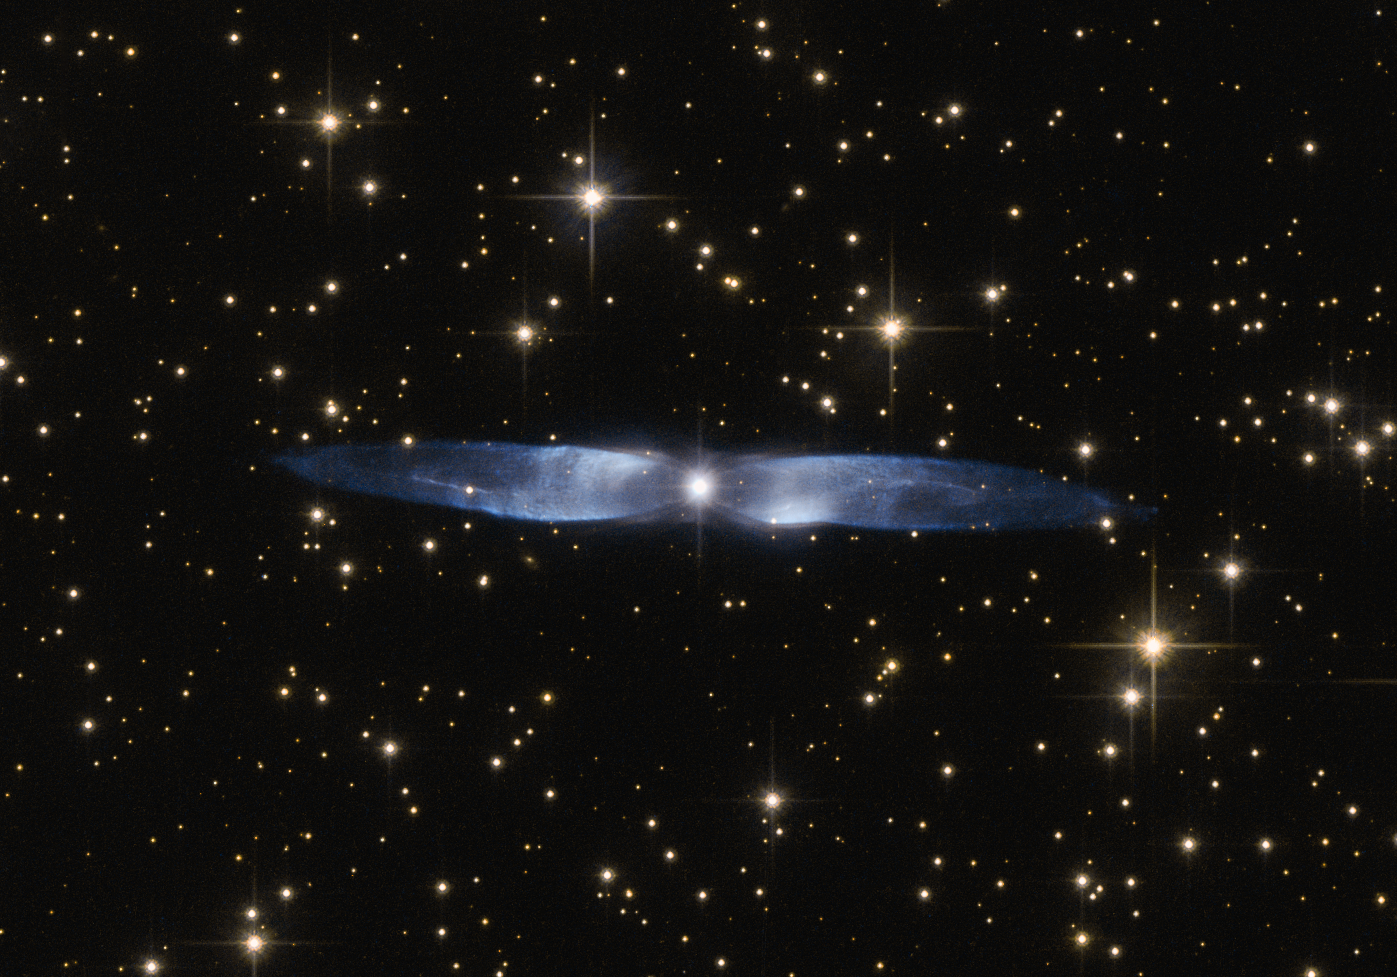

The icy blue wings of Hen 2-437

In this cosmic snapshot, the spectacularly symmetrical wings of Hen 2-437 show up in a magnificent icy blue hue. Hen 2-437 is a planetary nebula, one of around 3000 such objects known to reside within the Milky Way.

Located within the faint northern constellation of Vulpecula (The Fox), Hen 2-437 was first identified in 1946 by Rudolph Minkowski, who later also discovered the famous and equally beautiful M2-9 (otherwise known as the Twin Jet Nebula). Hen 2-437 was added to a catalogue of planetary nebula over two decades later by astronomer and NASA astronaut Karl Gordon Henize.

Planetary nebulae such as Hen 2-437 form when an aging low-mass star — such as the Sun — reaches the final stages of life. The star swells to become a red giant, before casting off its gaseous outer layers into space. The star itself then slowly shrinks to form a white dwarf, while the expelled gas is slowly compressed and pushed outwards by stellar winds. As shown by its remarkably beautiful appearance, Hen 2-437 is a bipolar nebula — the material ejected by the dying star has streamed out into space to create the two icy blue lobes pictured here.

Credit: ESA/Hubble & NASA Acknowledgement: Judy Schmidt (Geckzilla)